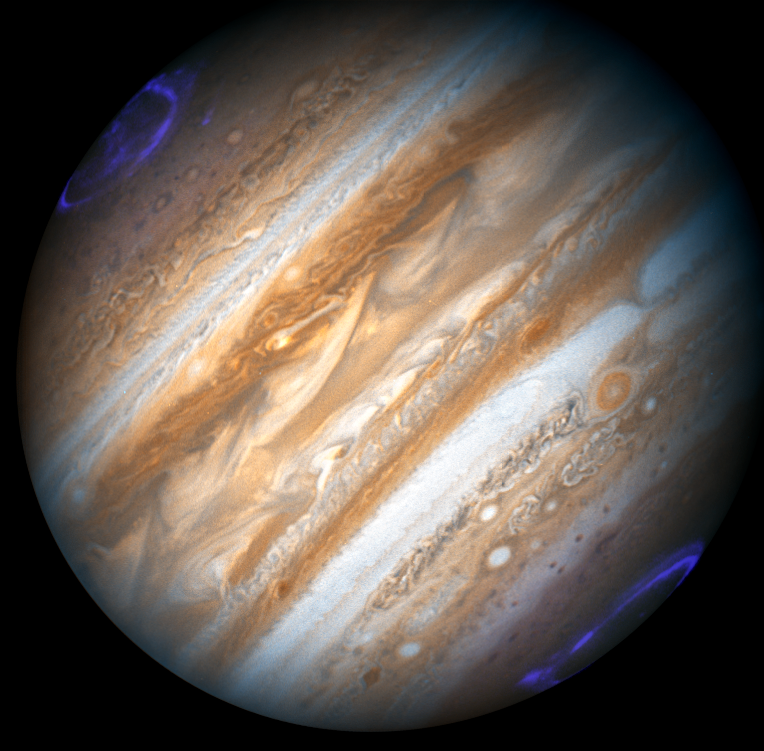

Hubble monitors Jupiter in support of the New Horizons Flyby

The Hubble Space Telescope has recently taken images of the planet Jupiter in support of its sister NASA Mission - New Horizons. The New Horizons spacecraft is en route to Pluto, and made its closest approach to Jupiter on February 28, 2007. Jupiter is giving New Horizons a gravity assist that will save three years on its journey to Pluto. The New Horizons spacecraft will fly by the Pluto system in July of 2015. After studying Pluto and its moons Charon, Nix and Hydra, New Horizons will go on for a hoped-for encounter with a yet-to-be-discovered Kuiper Belt object. A countdown clock on the New Horizon's Mission page (http://www.nasa.gov/mission_pages/newhorizons/main/index.html) patiently counts down the days until it reaches Pluto, only about 3000 more to go!

Credit: NASA/ESA, The Hubble Heritage Team. Acknowledgment: H. Weaver (JHU/APL) and A. Simon-Miller (NASA/GSFC)